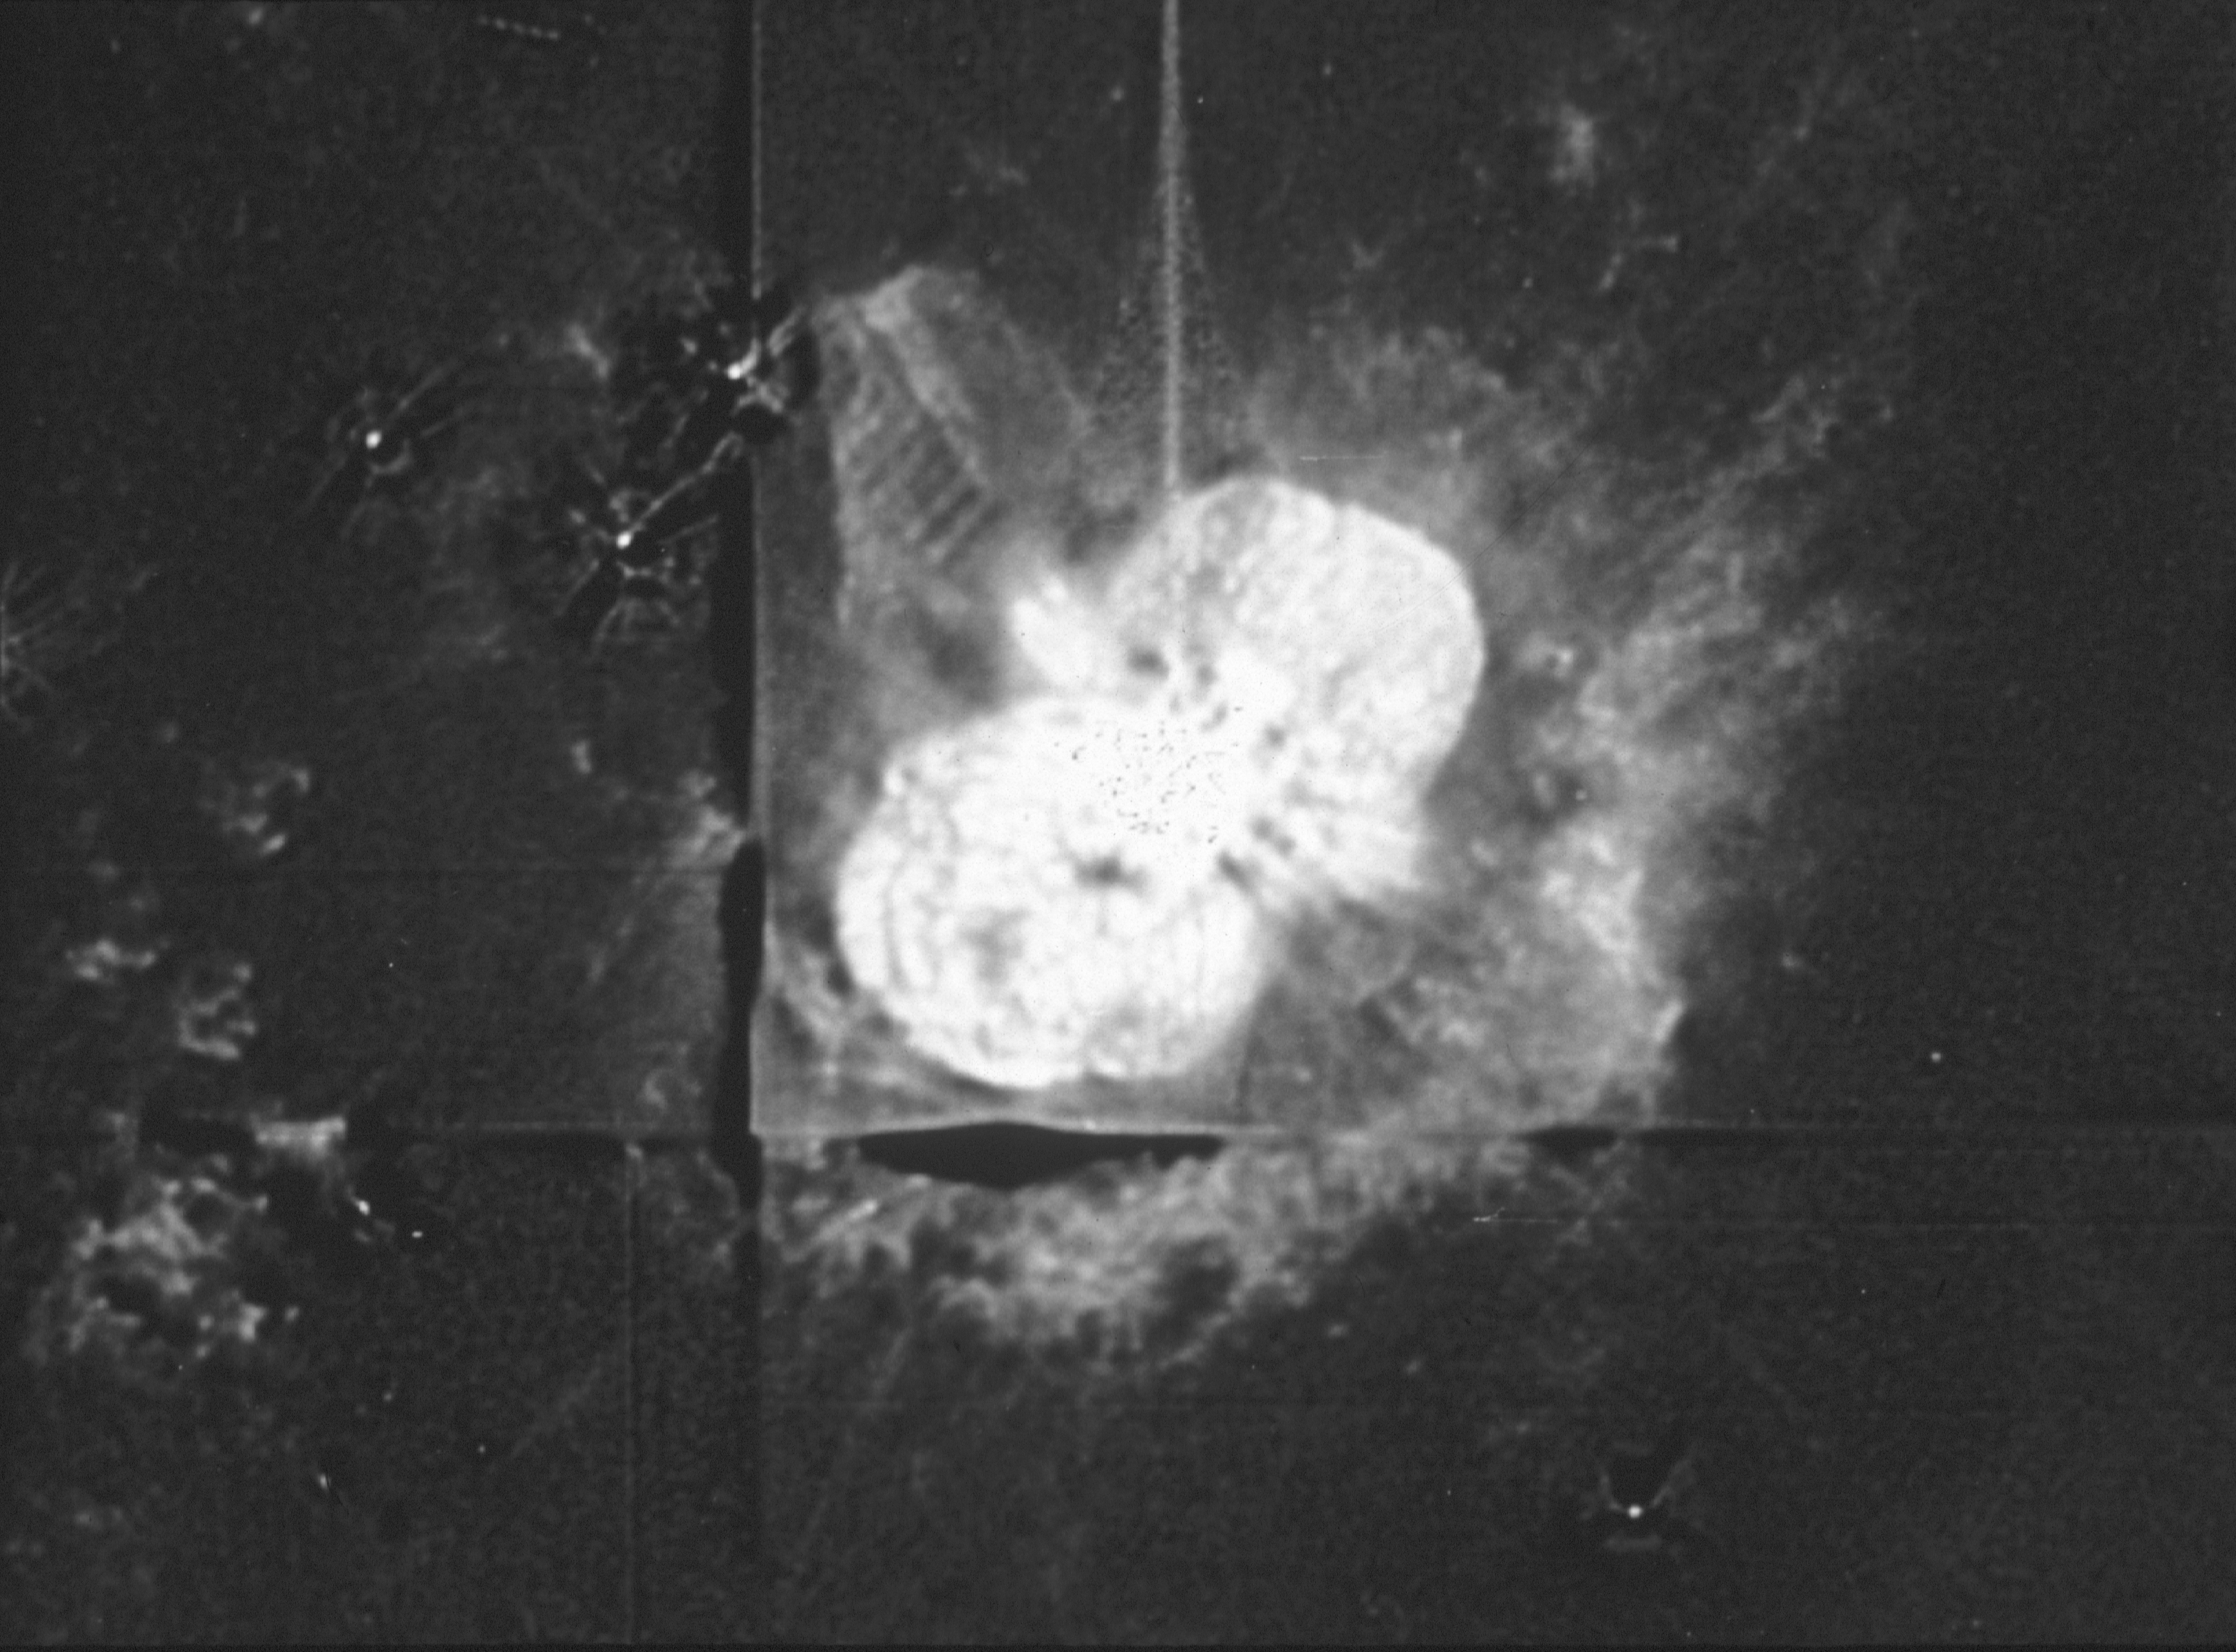

Eta Carinae

A Hubble Space Telescope observation of the star Eta Carinae, made with the Wide Field and Planetary Camera (WF/PC). An eruptive variable star, Eta Carinae has expelled a large amount of gas into the surrounding interstellar medium. The HST resolves individual clumps as small as only about ten times the size of our Solar System. Because it is clumpy on such small scales, and has such a well defined edge, the nebula is probably a thin and well defined shell of material, rather than a filled volume. Radiation pressure and stellar wind from Eta Carinae have fragmented the shell.

Ejecta from the star slams into slower moving gas to create a ridge of emission to the lower right. This ridge is in fact part of a "cap" of material located to the southwest and behind the star. Small knots and filaments trace the locations of other shock fronts within the nebula.

Credit: J. Hester/Caltech & NASA/ESA